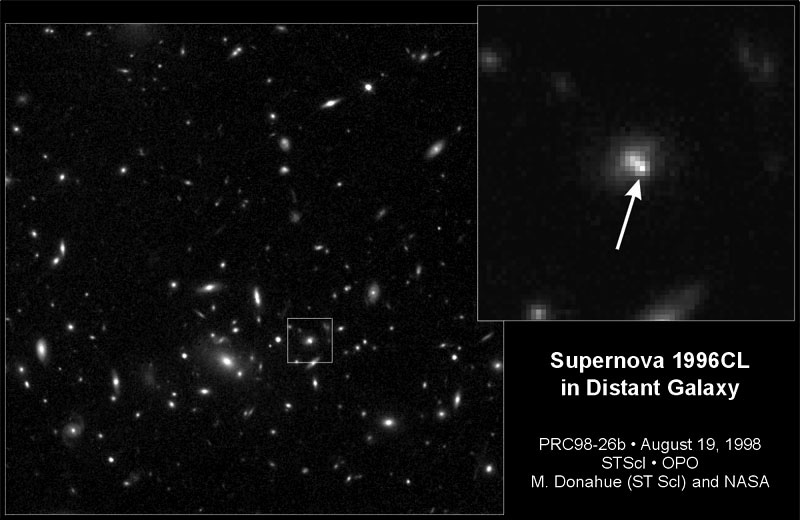

Supernova 1996cl in distant cluster

In March 1996, the Hubble Space Telescope's Wide Field and Planetary Camera 2 just happened to be pointed at the faraway galaxy cluster MS1054-0321 when it captured the light from an exploding star, called supernova 1996cl. The cluster is 8 billion light-years from Earth.

Credit: Saul Perlmutter of Lawrence Berkeley Laboratory in California